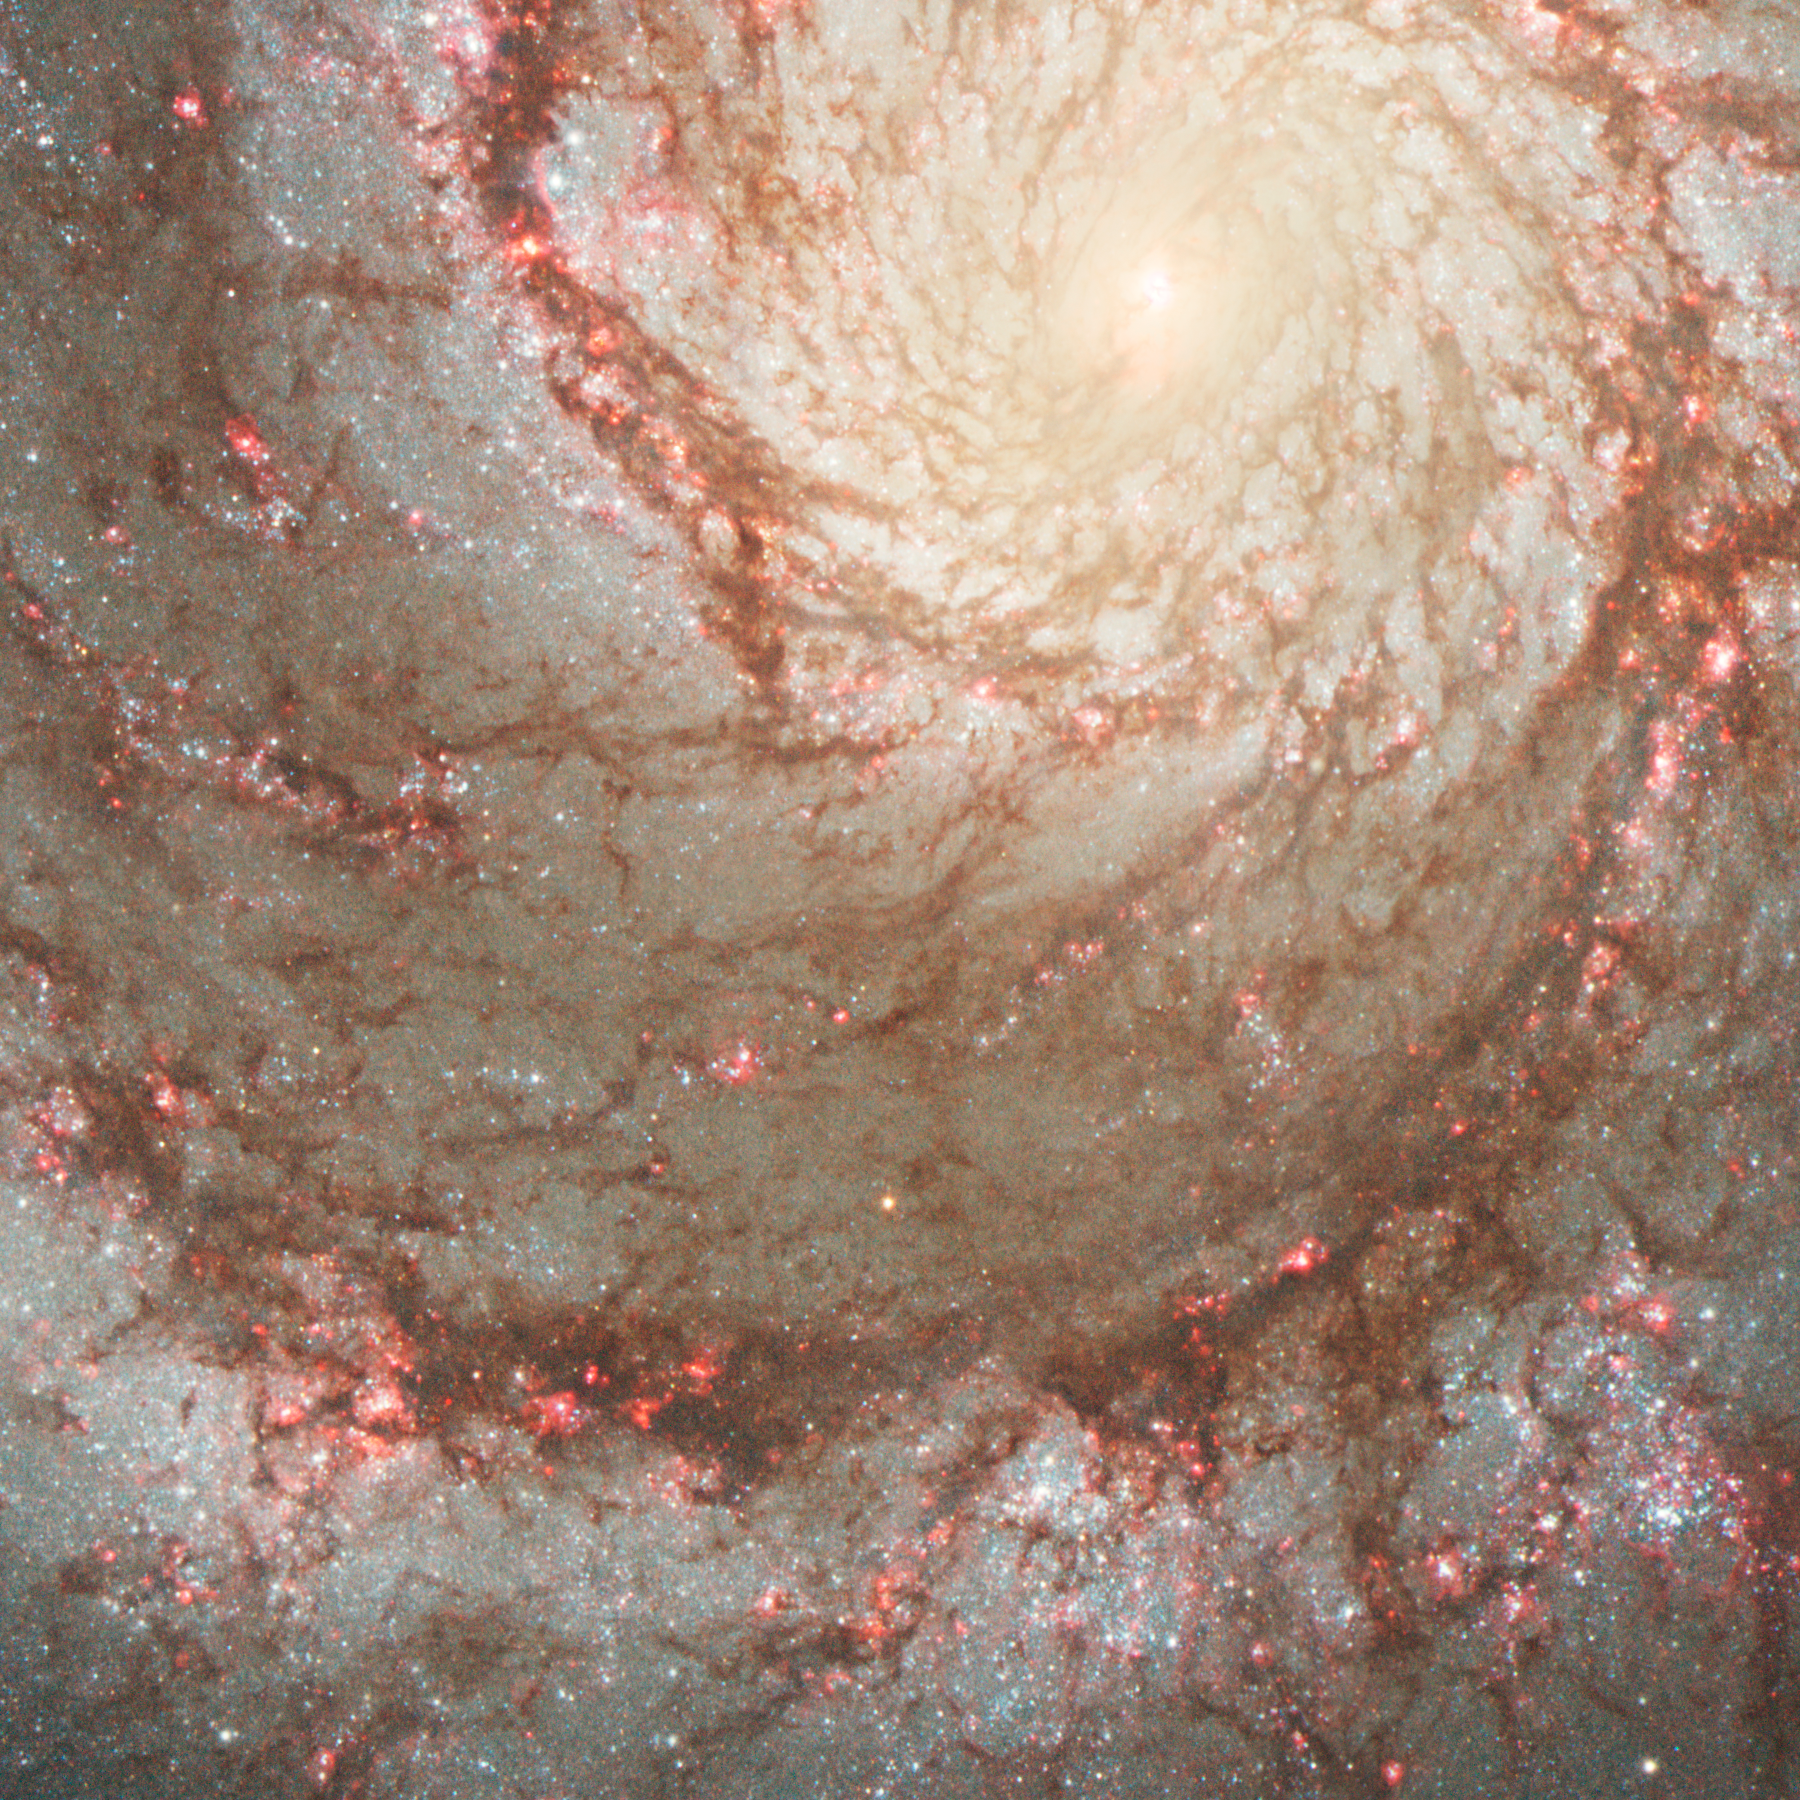

Section of M51 with progenitor star

This ESO/NASA Hubble Space Telescope picture shows M 51, an interacting spiral galaxy, which is also known as the Whirlpool Galaxy. It is located about 25 Million light years away from Earth, but can still easily observed with a small telescope by amateur astronomers.

M 51 is also a popular object among professional astronomers as it shows an ongoing enhanced star formation rate, which is probably caused by the interaction with its companion galaxy (not visible on the picture).

The galaxy was also the location of two supernovae within the last couple of years: The first one appeared in 2005, the second one in 2011.

Credit: NASA, ESA, W. Li and A. Filippenko (University of California, Berkeley), S. Beckwith (STScI), and The Hubble Heritage Team (STScI/AURA)